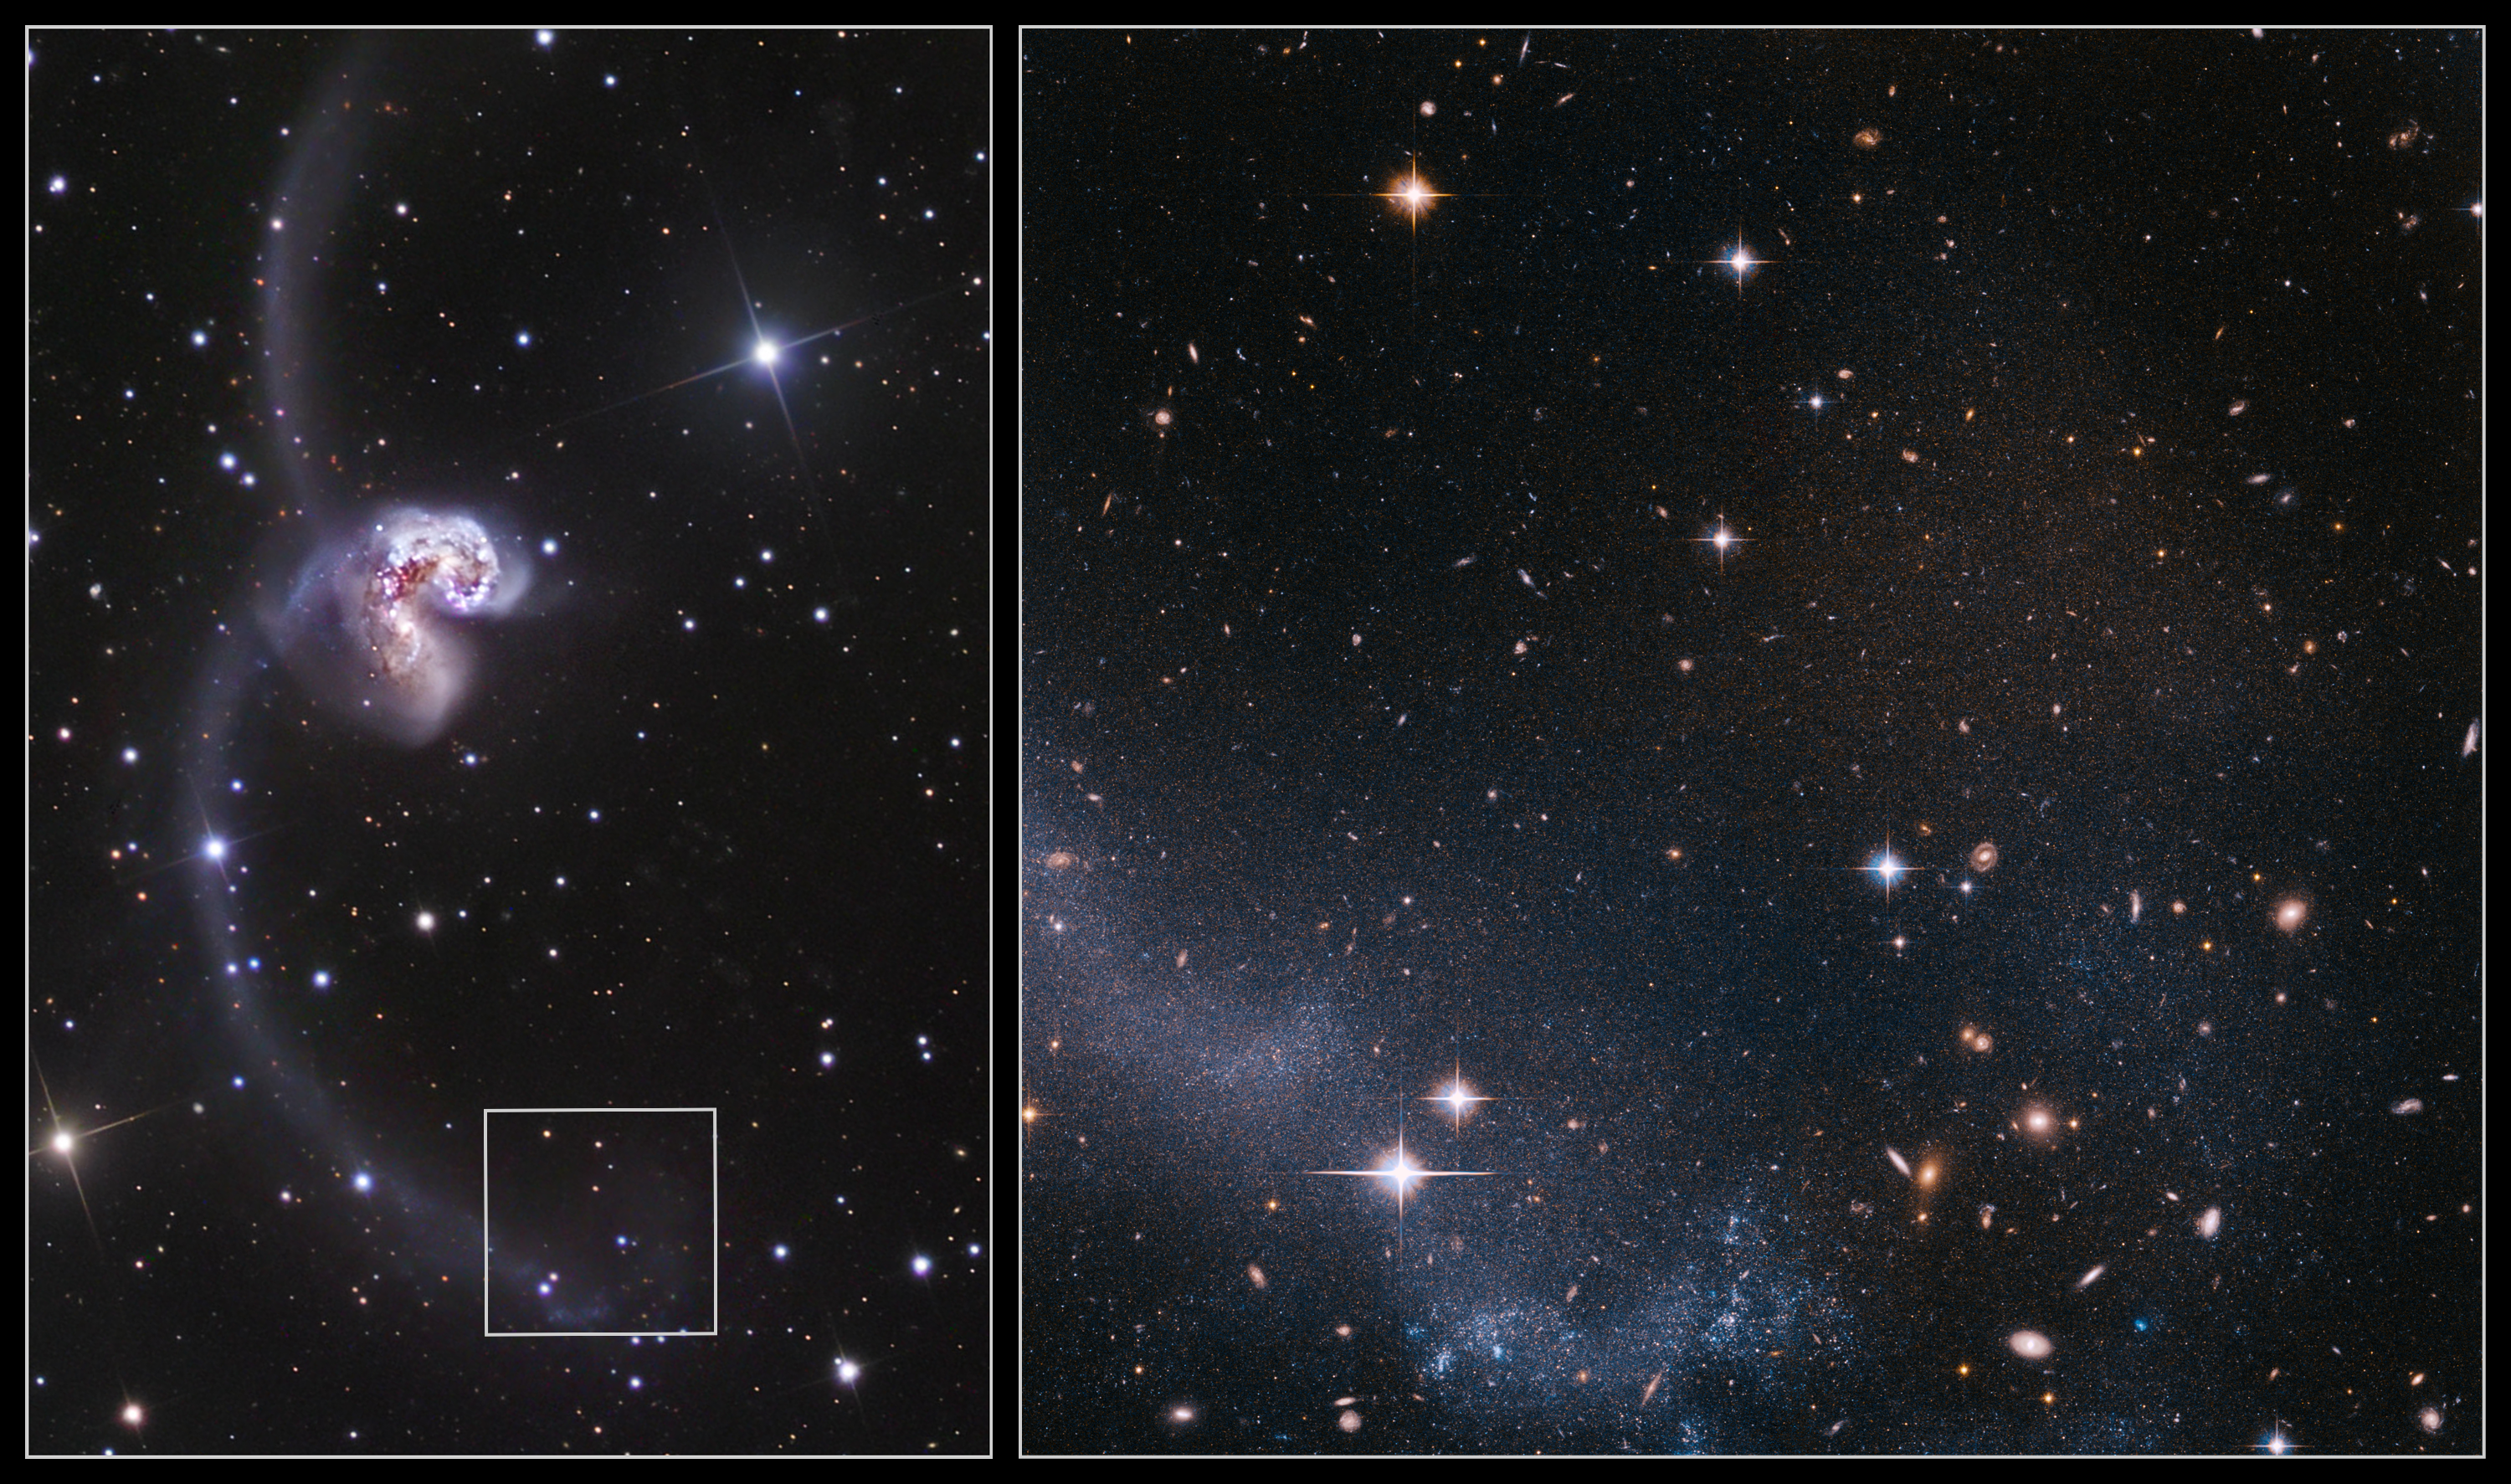

The Antennae moves closer

The Antennae Galaxies are among the closest known merging galaxies. The two galaxies, also known as NGC 4038 and NGC 4039, started to interact a few hundred million years ago, creating one of the most impressive sights in the night sky. They are considered by scientists as the archetypal merging galaxy system and are used as a standard with which to validate theories about galaxy evolution.

The ground-based image (left) is taken by Robert Gendler and shows the two merging galaxies and their impressive long tidal tails.

The Hubble Advanced Camera for Surveys image (right) shows a portion of the southern tidal tail. The main visible component consists of young blue stars recently formed out of the gas accumulating along the spine of the tail, and many red background galaxies can also be seen. The region is also filled by thousands of faint red stars, just visible when zooming on the image.

By measuring the colours and brightnesses of red giant stars in the system, the scientists found that the Antennae Galaxies are much closer than previously thought: 45 million light-years instead of the previous best estimate of 65 million light-years. These red stars cannot be brighter than a certain threshold, and it is this luminosity threshold that was used to derive the new distance of the Antennae.

Credit: NASA, ESA & Ivo Saviane (European Southern Observatory)/Robert Gendler